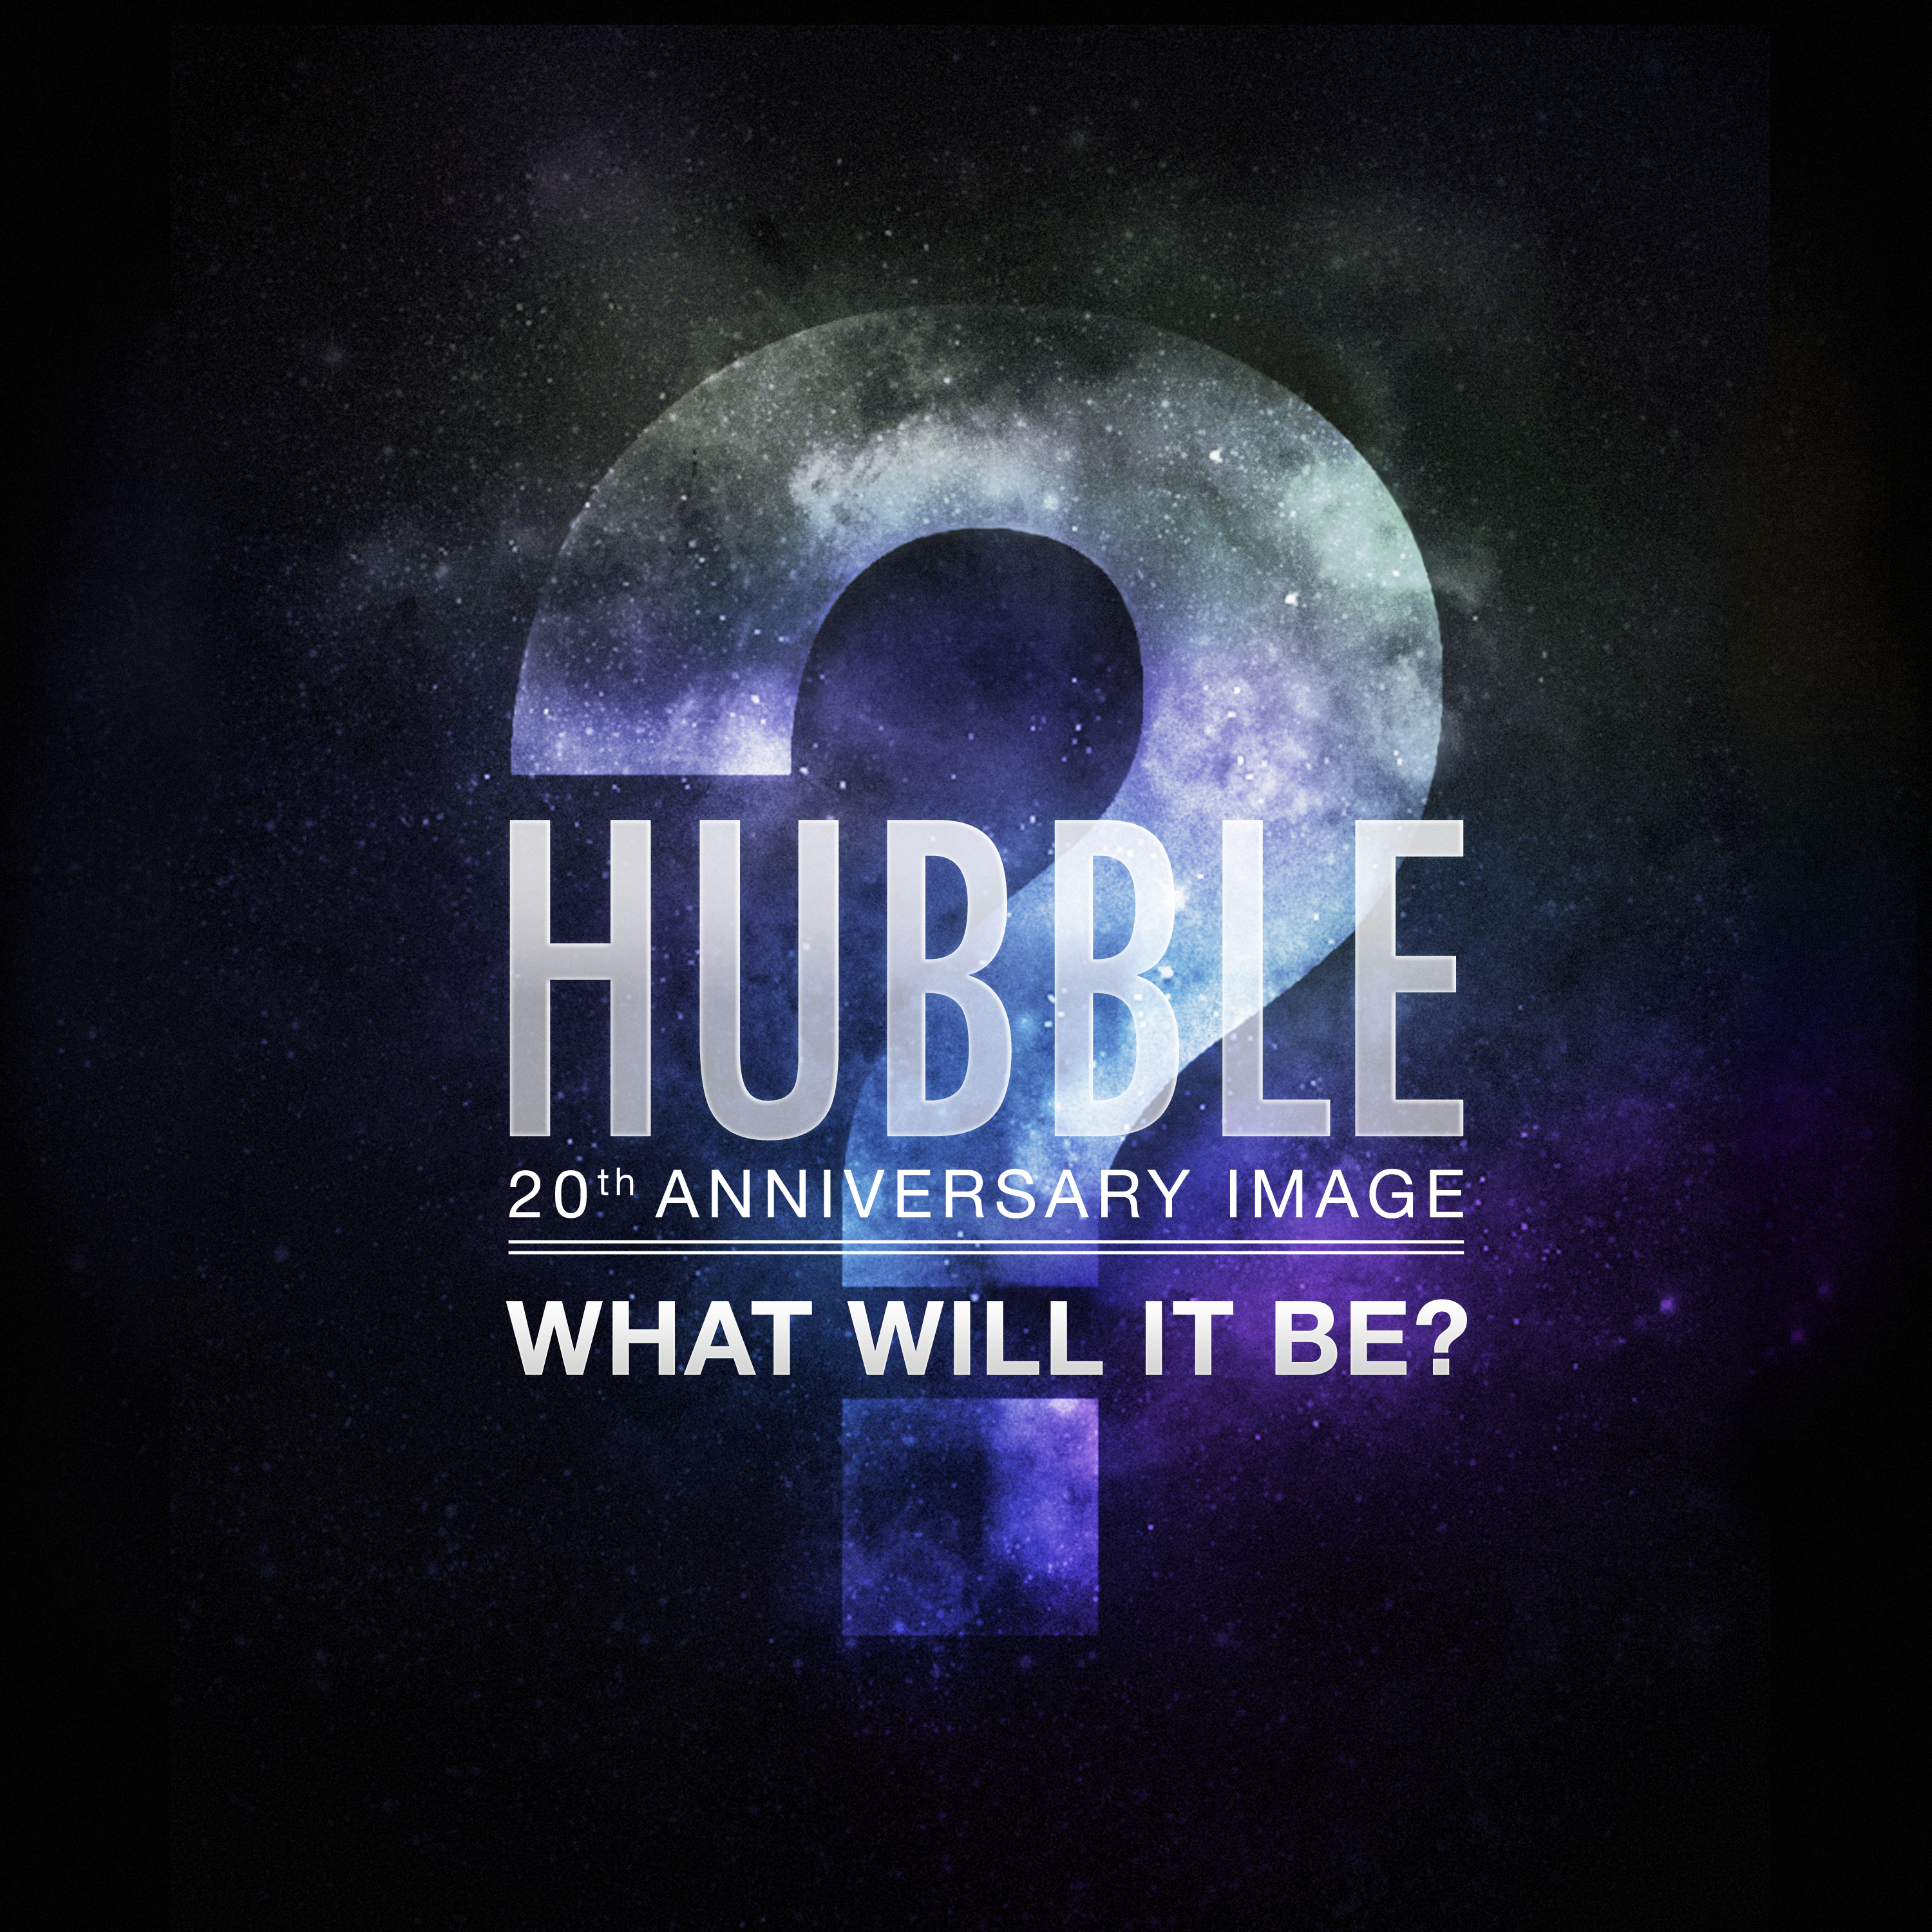

Media advisory: brand-new Hubble 20th anniversary image to be revealed this Friday

The European Space Agency (ESA) in conjunction with American partners NASA and the Space Telescope Science Institute (STScI) will release a gorgeous new Hubble image that celebrates the venerable observatory’s 20th year in orbit. The Hubble anniversary images and videos will be posted on the revamped http://www.spacetelescope.org web site, the European home for Hubble science, at 10:00 CEST on Friday, 23 April 2010.

April 24 2010 will mark the 20th anniversary of launch of the iconic telescope. A project that took decades to get to the launch pad, Hubble is responsible for many of the most recent fundamental cosmic discoveries, including: the deepest views of our Universe, a more accurate estimation of the age of the Universe, the characterisation of black holes in the cores of galaxies and exoplanets orbiting stars outside of our Solar System.

ESA contributes a 15 percent share to Hubble's development and in return European astronomers receive a guaranteed 15 percent share of observing time. In practice the high quality of proposals from scientists in Europe has kept their average share closer to 20 percent. ESA's contributions to Hubble have been vital for the project.

Credit: NASA & ESA